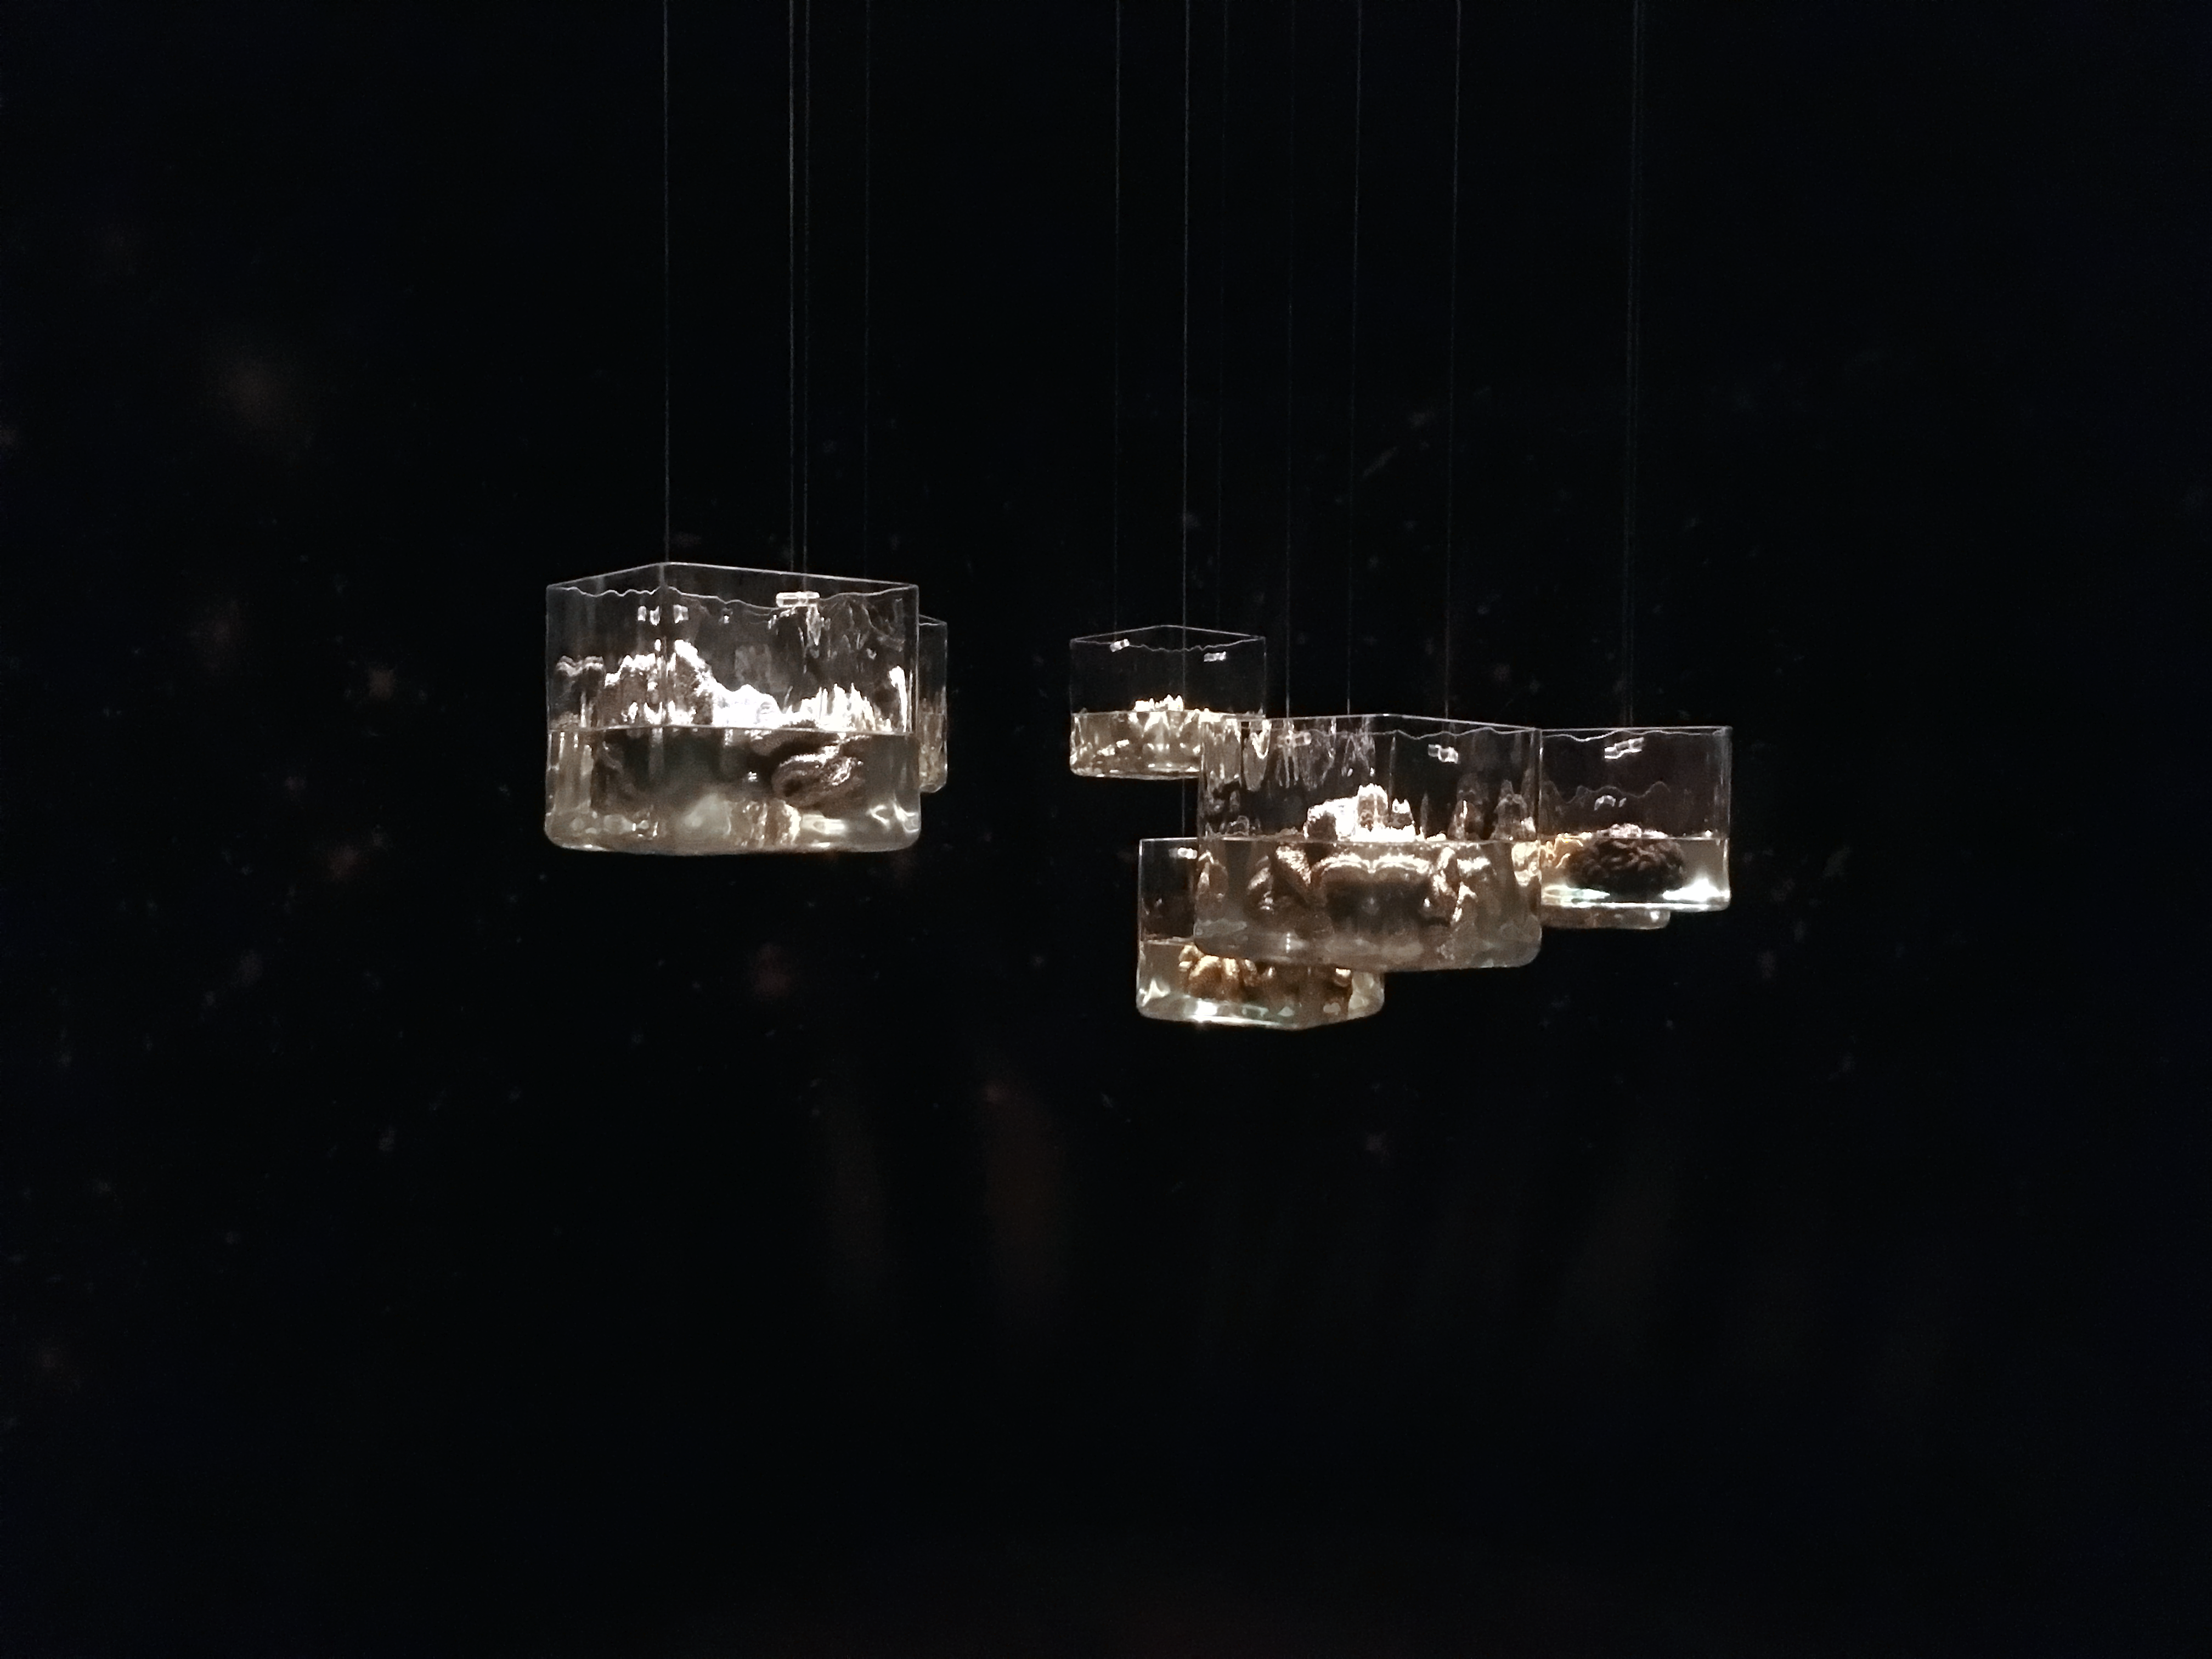

The mind is the limit

We can go anywhere our mind lets us imagine. That is why exploration is first and foremost a question of crossing mental boundaries. This message is transported by the installation Brains by artist Maraluisa Tadei. Her art is on display in the exhibition Our Place in Space.

Credit: ESA/Hubble, Pam Jeffries